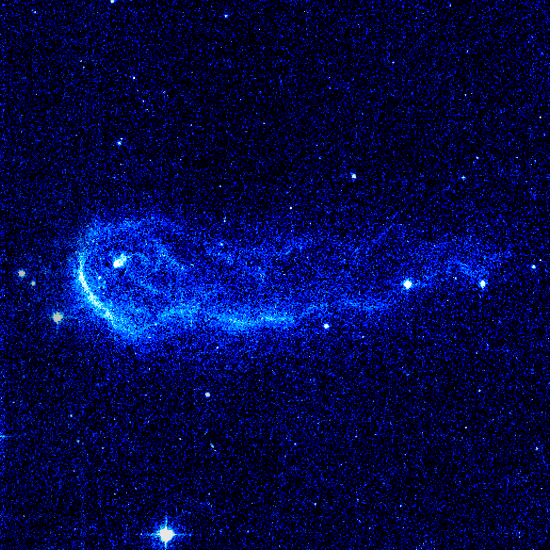

Hubble Image of Stellar Bow Shock (3 of 4)

Resembling a comet streaking across the sky this speedy star is plowing through a region of dense interstellar gas and creating a brilliant arrowhead structure and a trailing tail of glowing gas. The star is one of 14 young runaway stars spotted by the Advanced Camera for Surveys between October 2005 and July 2006.

Credit: NASA, ESA and R. Sahai (NASA's Jet Propulsion Laboratory)